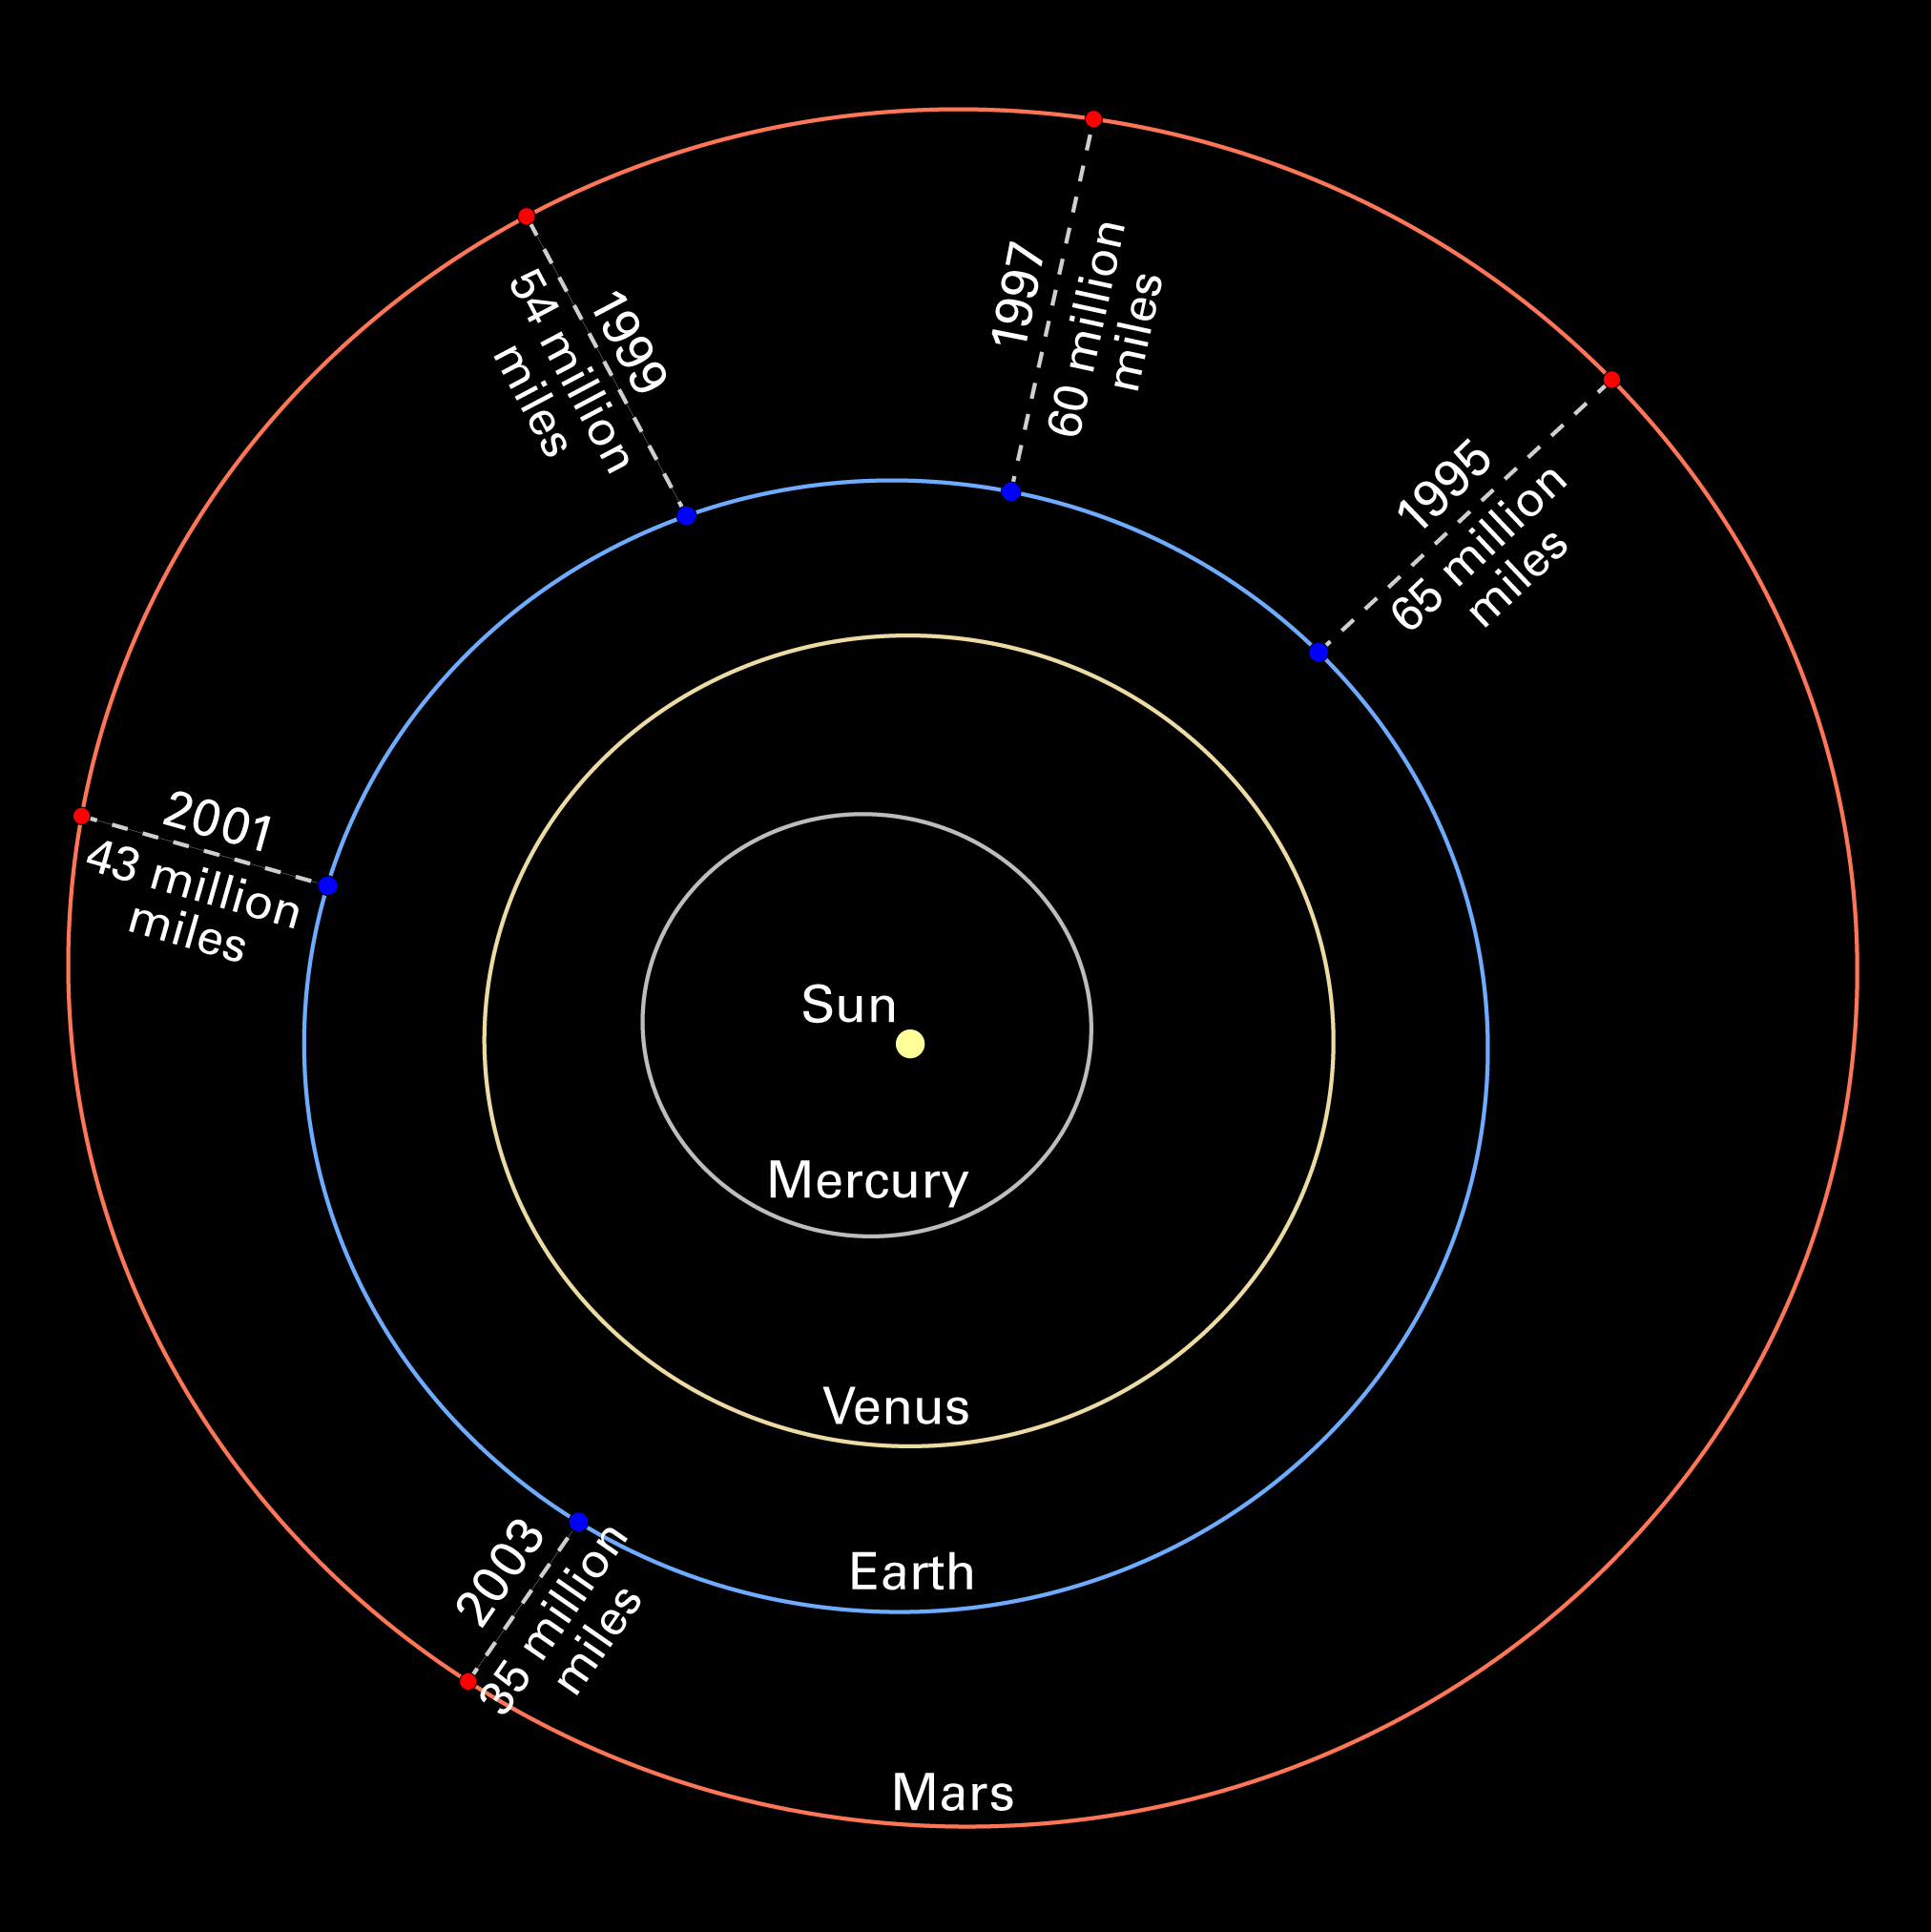

Mars oppositions Solar System diagram without images

Mars is hurtling toward Earth at a rate of 22,000 miles an hour (36,000 kilometers an hour)! Not to worry. The two planets are just setting the stage for their closest encounter in recorded human history. On August 27, 2003, the third and fourth planets from the Sun will be within 35 million miles (56 million kilometers) of each other.

Credit: NASA/ESA and Z. Levay (STScI)